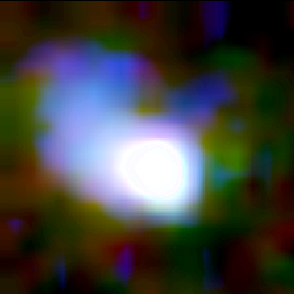

Galaxy building blocks

This is one Proto Galaxy out of a series of 18, taken by the Wide Field Planetary Camera 2.

Credit: Rogier Windhorst and Sam Pascarelle (Arizona State University) and NASA/ESA